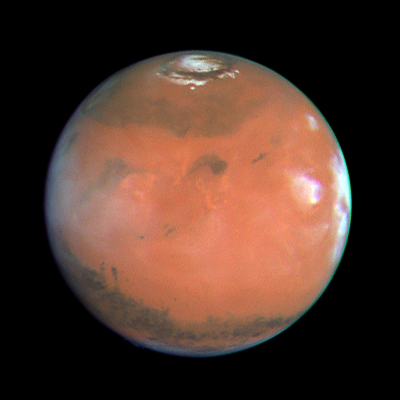

Four Views of Mars in Northern Summer

This relatively featureless sector of Mars stretches from the Elysium volcanic region in the west to the Tharsis volcanoes (shrouded by the bright clouds near the afternoon limb) in the east.

The group of three dark specks just left of center are all that remain of Cerberus, a very prominent dark region during the Viking and Mariner 9missions. This is an example of the remarkable large scale changes which can occur on Mars due to windblown dust: the former dark area has now been covered by a layer of bright dust, masking the underlying material.

Credit: Phil James (Univ. Toledo), Todd Clancy (Space Science Inst., Boulder, CO), Steve Lee (Univ. Colorado), and NASA/ESA